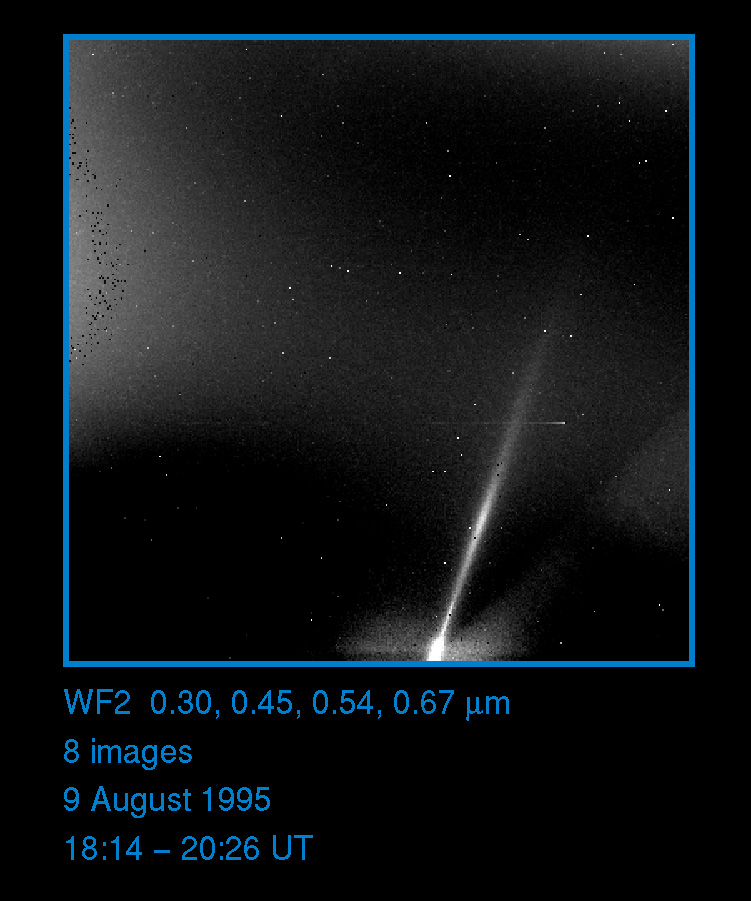

Saturn's E ring in ultraviolet light

Visible from Earth only at times of ring plane crossing, Saturn's tenuous E Ring was discovered during the 1966 crossings and imaged again in 1980. From these observations, its colour is known to be distinctively blue. The E Ring was captured in ultraviolet light for the first time in this image taken with HST's Wide Field and Planetary Camera on 9 August 1995. Five individual images taken with a broadband 3000 A filter were combined, amounting to a total exposure time of 2200 sec. Shorter exposure images were also obtained with blue, red and infrared filters in order to characterize the ring's color.

The peak brightness of the E Ring occurs at 3.9 Saturn radii (235,000km), coinciding with the orbit of Enceladus. In the HST images it can be traced out to a maximum distance of approximately 8 Rs (480,000km). The vertical thickness of the ring, on the other hand, is smallest at Enceladus' orbit, with the ring puffing up noticeably at larger distances to 15,000 km or more thick.

Credit: Phil Nicholson (Cornell University), Mark Showalter (NASA/ESA-Ames/Stanford) and NASA/ESA